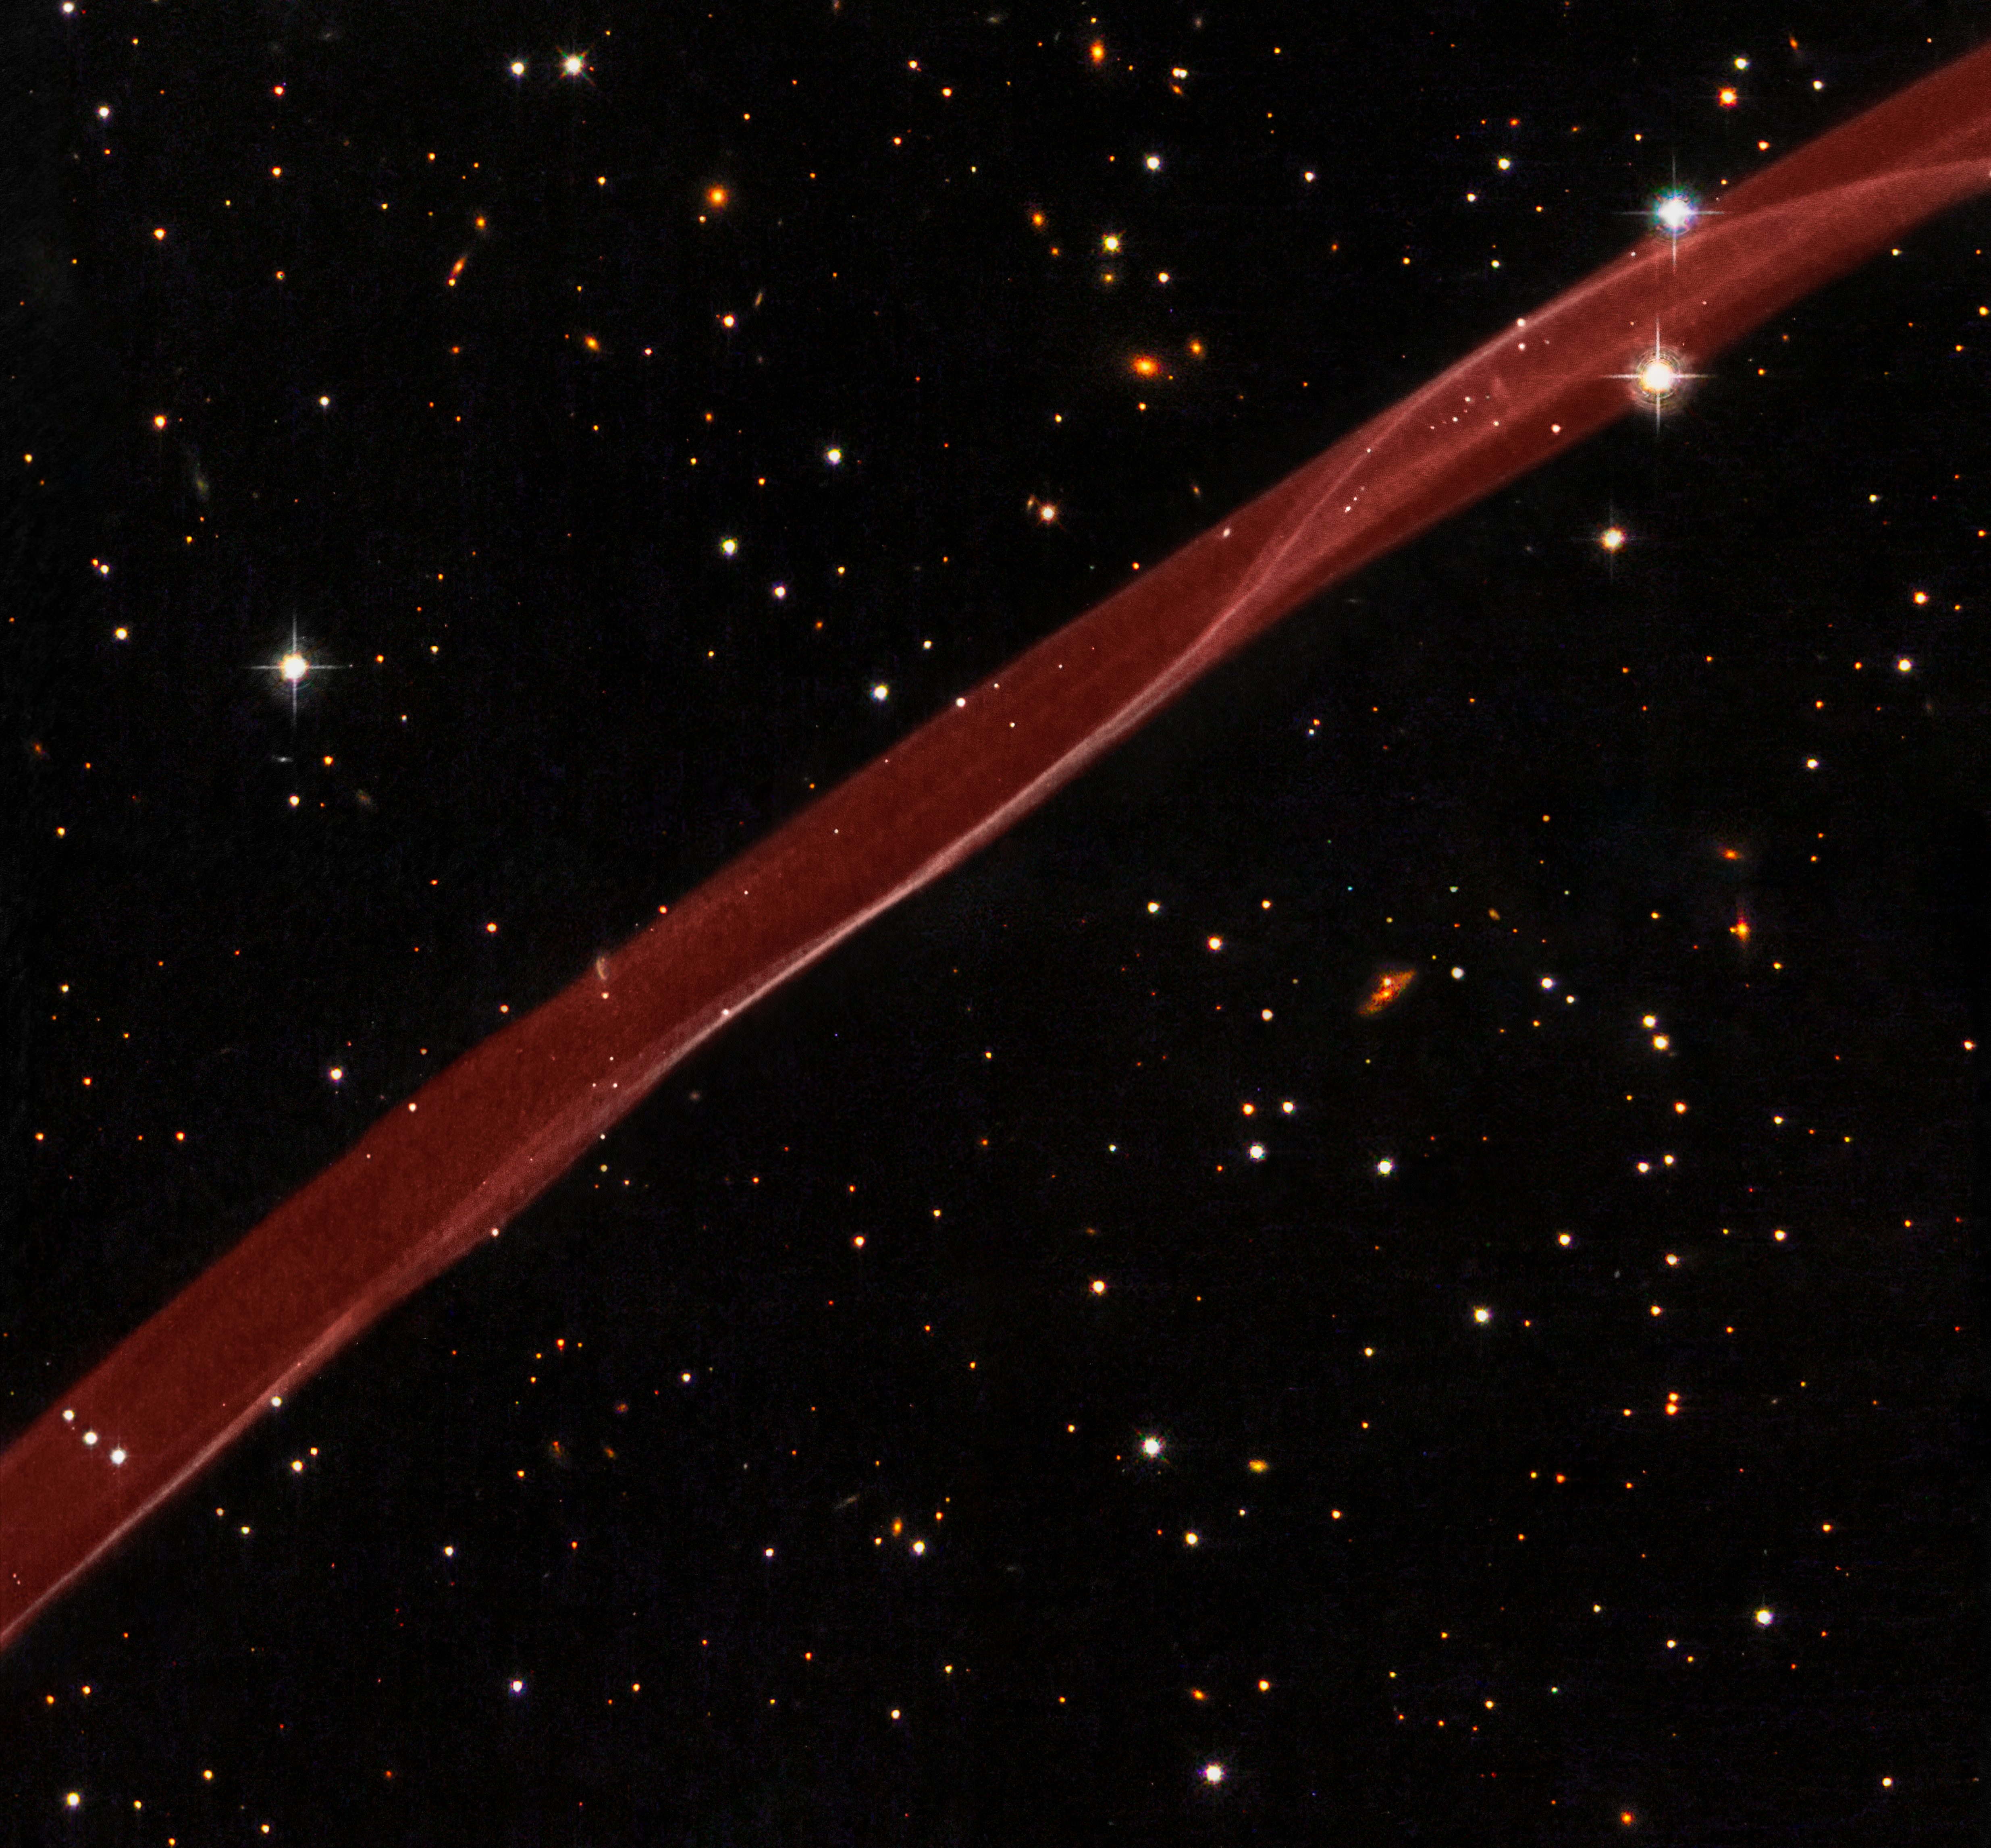

Hubble sees stars and a stripe in celestial fireworks

A delicate ribbon of gas floats eerily in our galaxy. A contrail from an alien spaceship? A jet from a black hole? Actually this image, taken by the NASA/ESA Hubble Space Telescope, is a very thin section of a supernova remnant caused by a stellar explosion that occurred more than 1,000 years ago.

On or around 1 May 1006 A.D., observers from Africa to Europe to the Far East witnessed and recorded the arrival of light from what is now called SN 1006, a tremendous supernova explosion caused by the final death throes of a white dwarf star nearly 7,000 light-years away. The supernova was probably the brightest star ever seen by humans, and surpassed Venus as the brightest object in the night time sky, only to be surpassed by the Moon. It was visible even during the day for weeks, and remained visible to the naked eye for at least two and a half years before fading away.

SN 1006 resides within our Milky Way Galaxy. Located more than 14 degrees off the plane of the galaxy's disk, there is relatively little confusion with other foreground and background objects in the field when trying to study this object. In the Hubble image, many background galaxies (orange extended objects) far off in the distant universe can be seen dotting the image. Most of the white dots are foreground or background stars in our Milky Way galaxy.

This image is a composite of hydrogen-light observations taken with Hubble's Advanced Camera for Surveys in February 2006 and Wide Field Planetary Camera 2 observations in blue, yellow-green, and near-infrared light taken in April 2008. The supernova remnant, visible only in the hydrogen-light filter was assigned a red hue in the Heritage colour image.

Credit: NASA, ESA, and the Hubble Heritage Team (STScI/AURA) Acknowledgment: W. Blair (Johns Hopkins University)